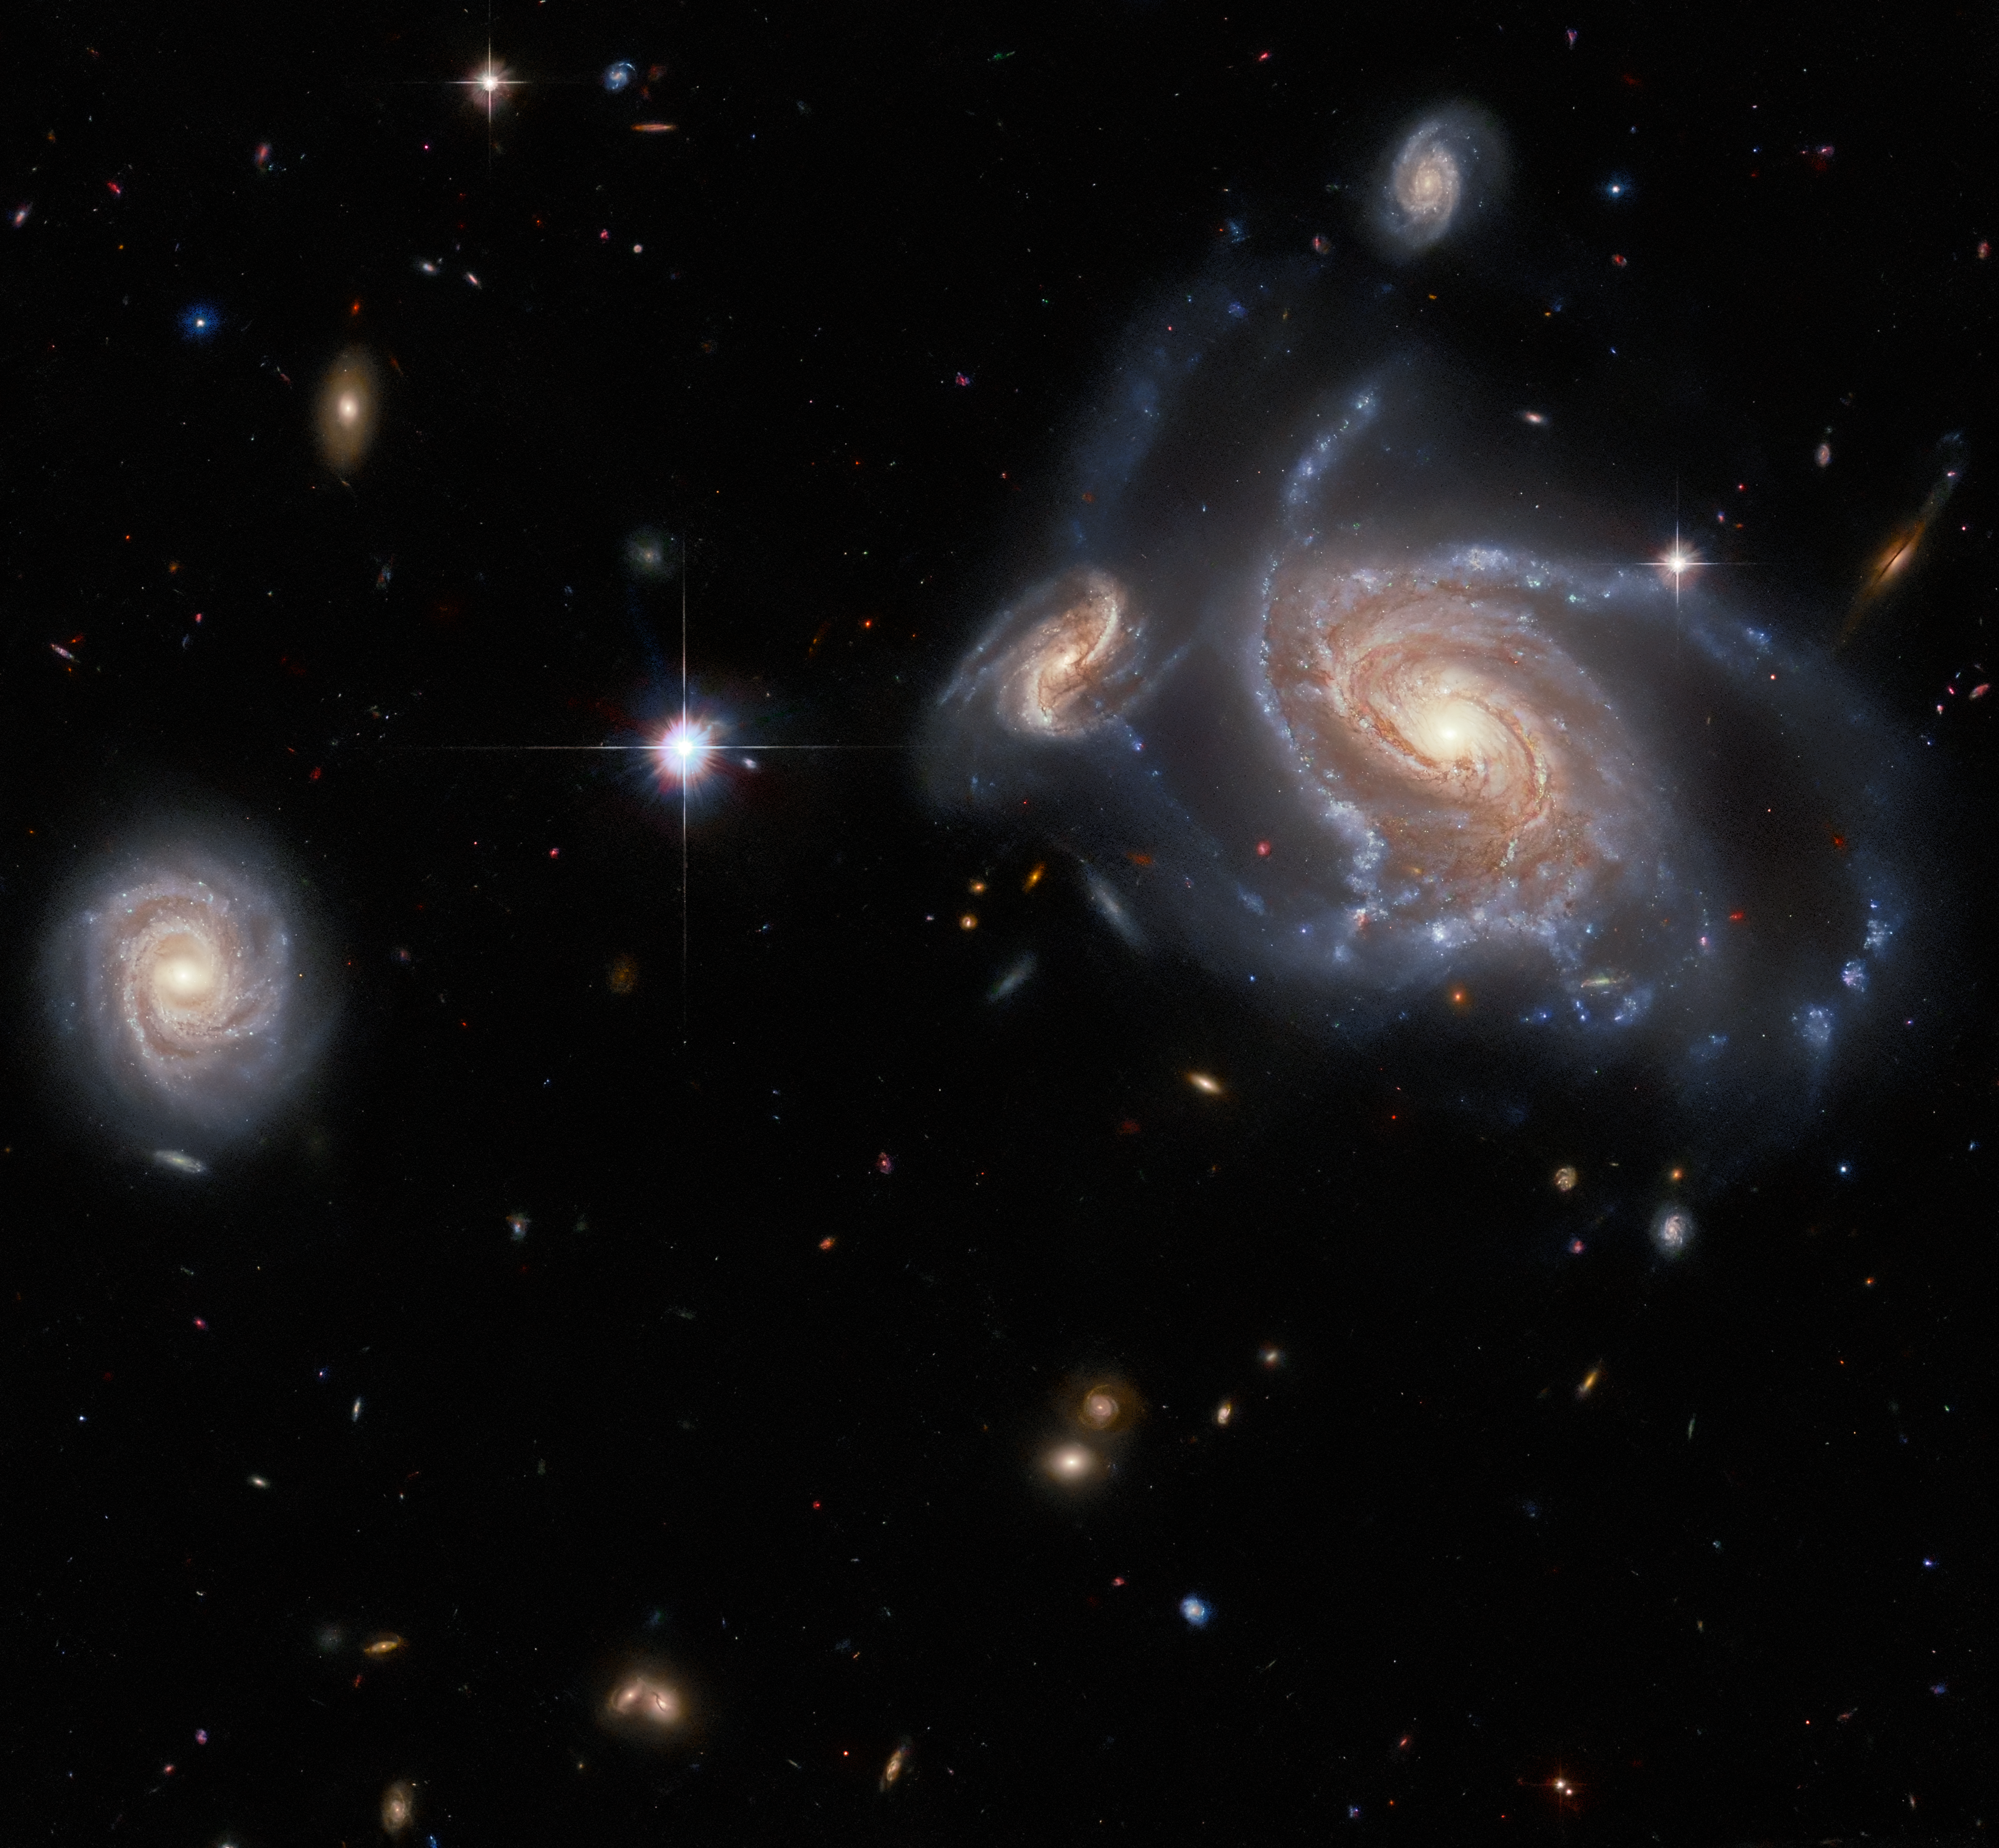

It’s all relative

This Hubble Picture of the Week features a richness of spiral galaxies: the large, prominent spiral galaxy on the right side of the image is NGC 1356; the two apparently smaller spiral galaxies flanking it are LEDA 467699 (above it) and LEDA 95415 (very close at its left) respectively; and finally, IC 1947 sits along the left side of the image.

ThIs image is a really interesting example of how challenging it can be to tell whether two galaxies are actually close together, or just seem to be from our perspective here on Earth. A quick glance at this image would likely lead you to think that NGC 1356, LEDA 467699 and LEDA 95415 were all close companions, whilst IC 1947 was more remote. However, we have to remember that two-dimensional images such as this one only give an indication of angular separation: that is, how objects are spread across the sphere of the night sky. What they cannot represent is the distance objects are from Earth.

For instance, whilst NGC 1356 and LEDA 95415 appear to be so close that they must surely be interacting, the former is about 550 million light-years from Earth and the latter is roughly 840 million light-years away, so there is nearly a whopping 300 million light-year separation between them. That also means that LEDA 95415 is likely nowhere near as much smaller than NGC 1356 as it appears to be.

On the other hand, whilst NGC 1356 and IC 1947 seem to be separated by a relative gulf in this image, IC 1947 is only about 500 million light-years from Earth. The angular distance apparent between them in this image only works out to less than four hundred thousand light-years, so they are actually much much closer neighbours in three-dimensional space than NGC 1356 and LEDA 95415!

Credit: ESA/Hubble & NASA, J. Dalcanton, Dark Energy Survey/DOE/FNAL/NOIRLab/NSF/AURA Acknowledgement: L. Shatz